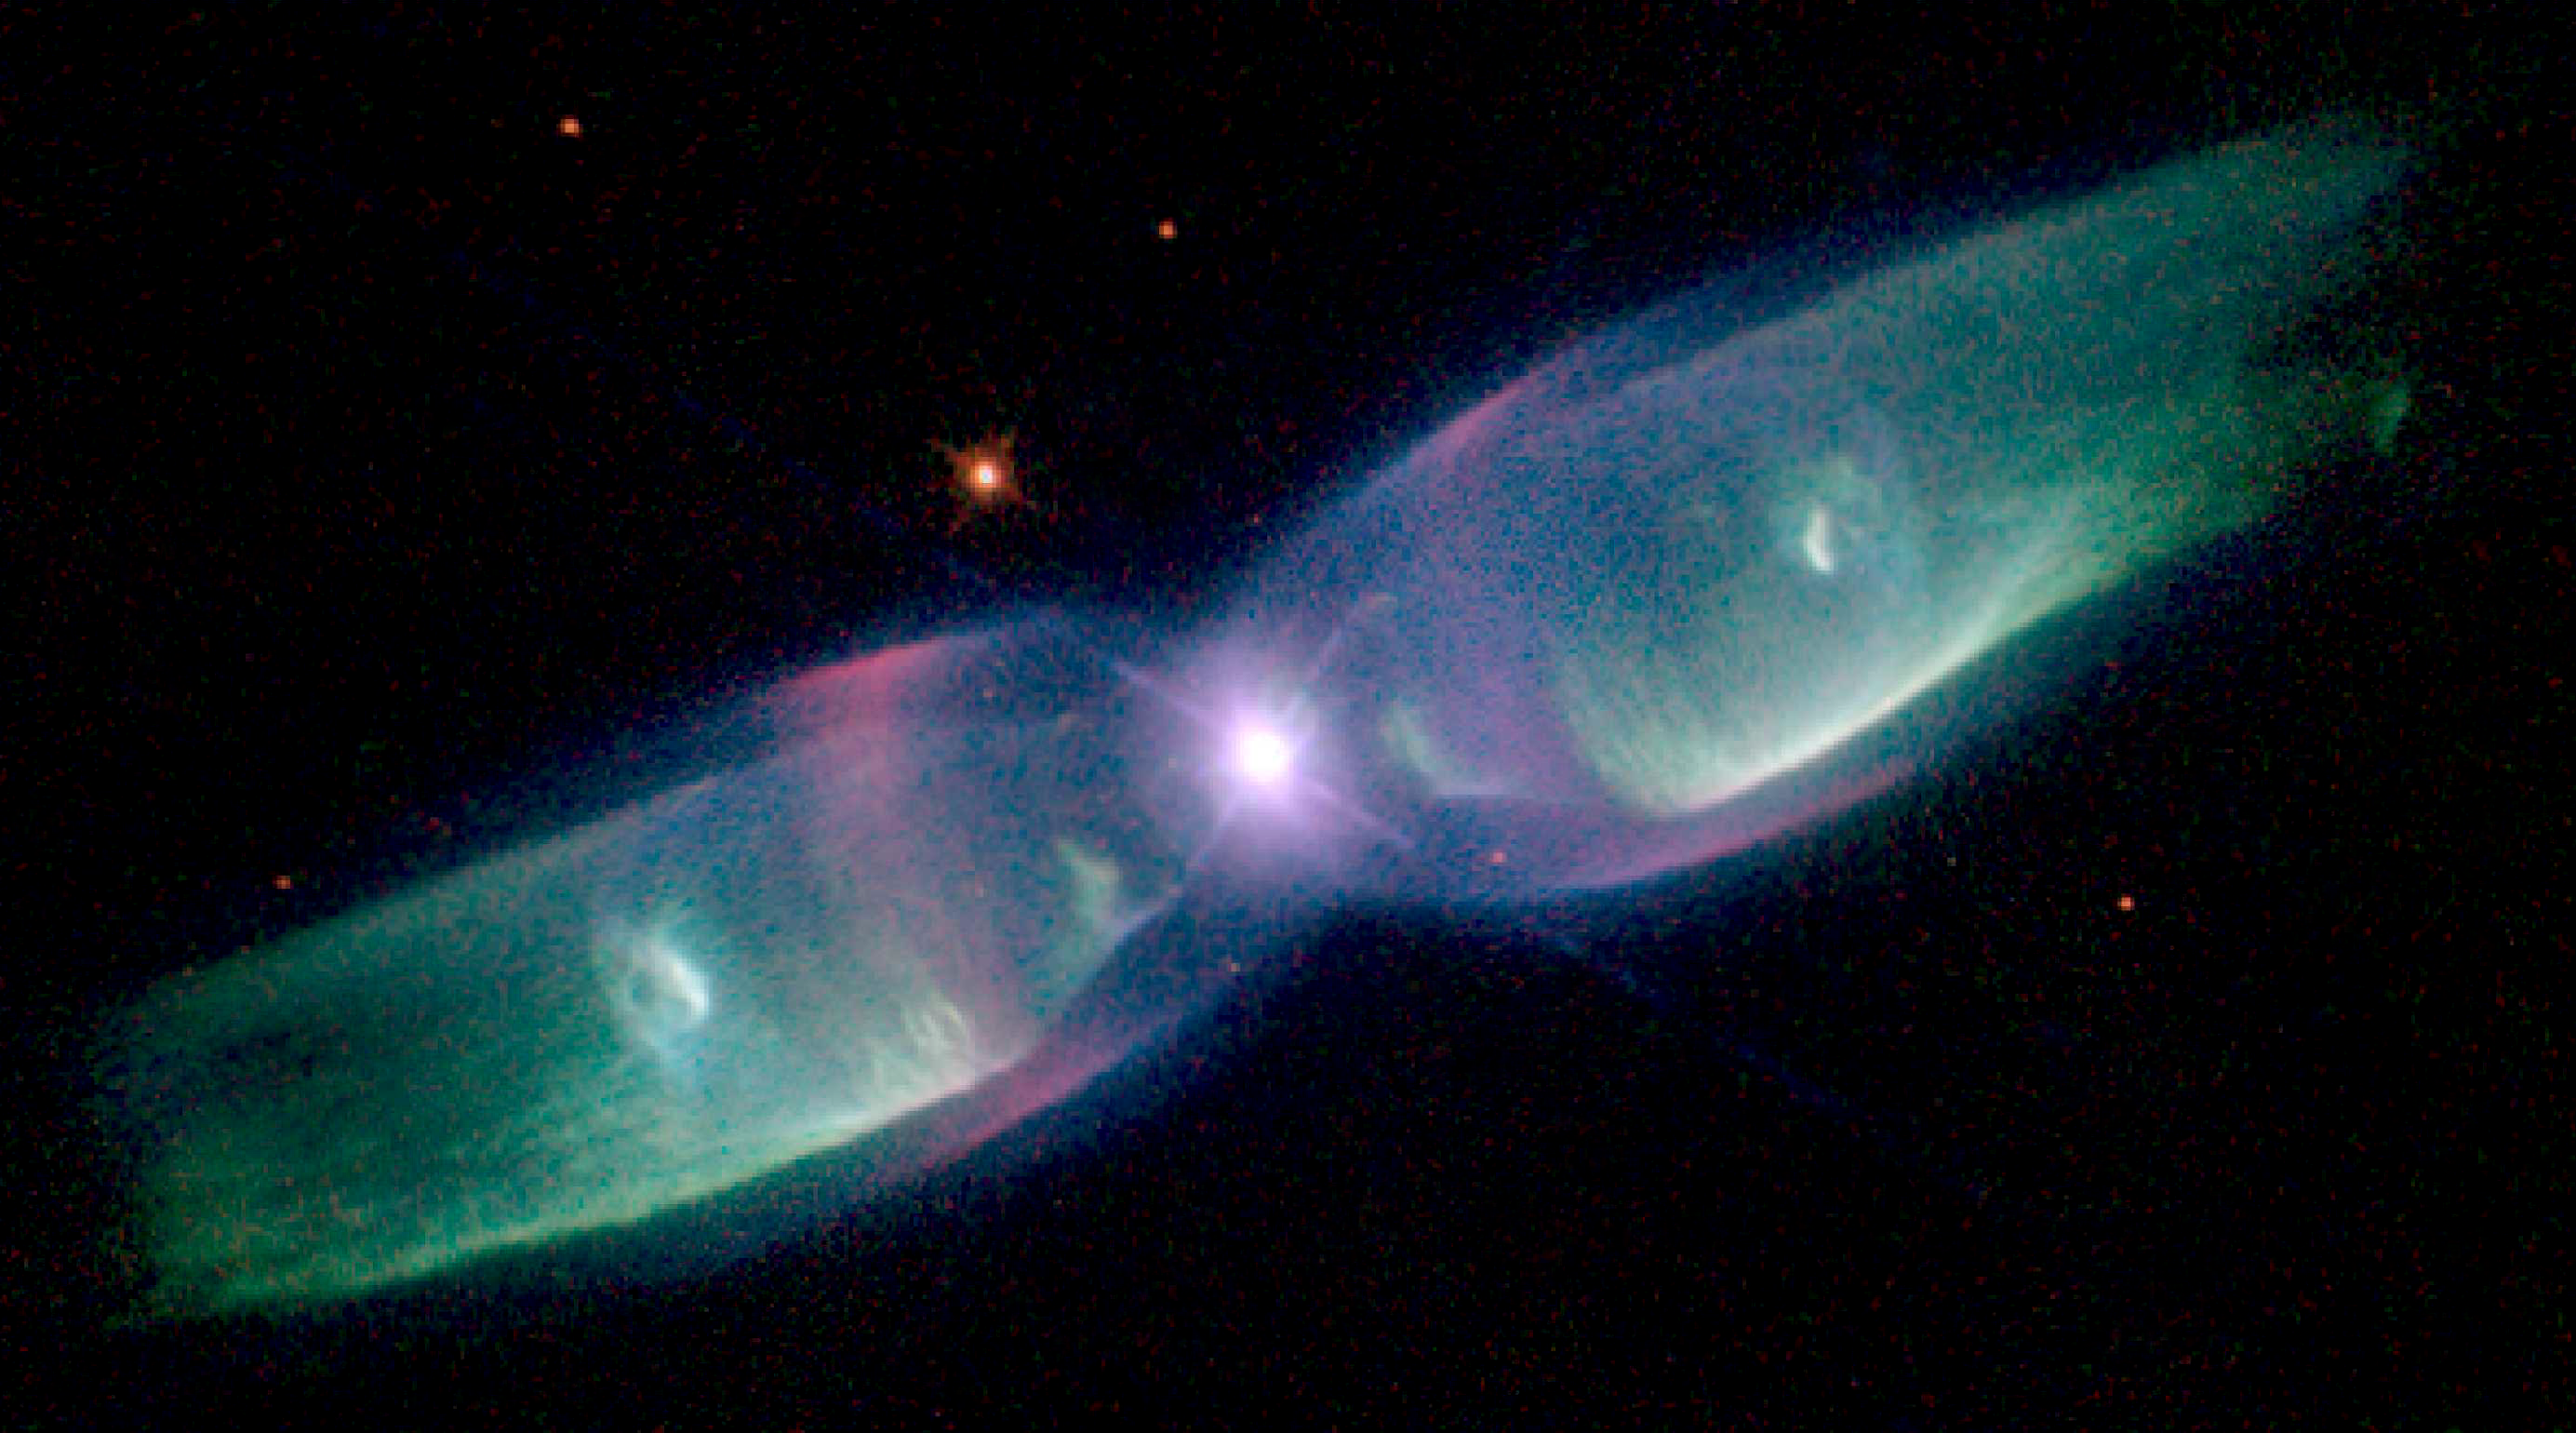

Hubble sees supersonic exhaust from nebula

M2-9 is a striking example of a 'butterfly' or a bipolar planetary nebula. Another more revealing name might be the 'Twin Jet Nebula'. If the nebula is sliced across the star, each side of it appears much like a pair of exhausts from jet engines. Indeed, because of the nebula's shape and the measured velocity of the gas, in excess of 200 miles per second (approx. 322 kilometres per second), astronomers believe that the description as a super-super-sonic jet exhaust is quite apt. Ground-based studies have shown that the nebula's size increases with time, suggesting that the stellar outburst that formed the lobes occurred just 1, 200 years ago.

Credit: Bruce Balick (University of Washington), Vincent Icke (Leiden University, The Netherlands), Garrelt Mellema (Stockholm University), and NASA/ESA